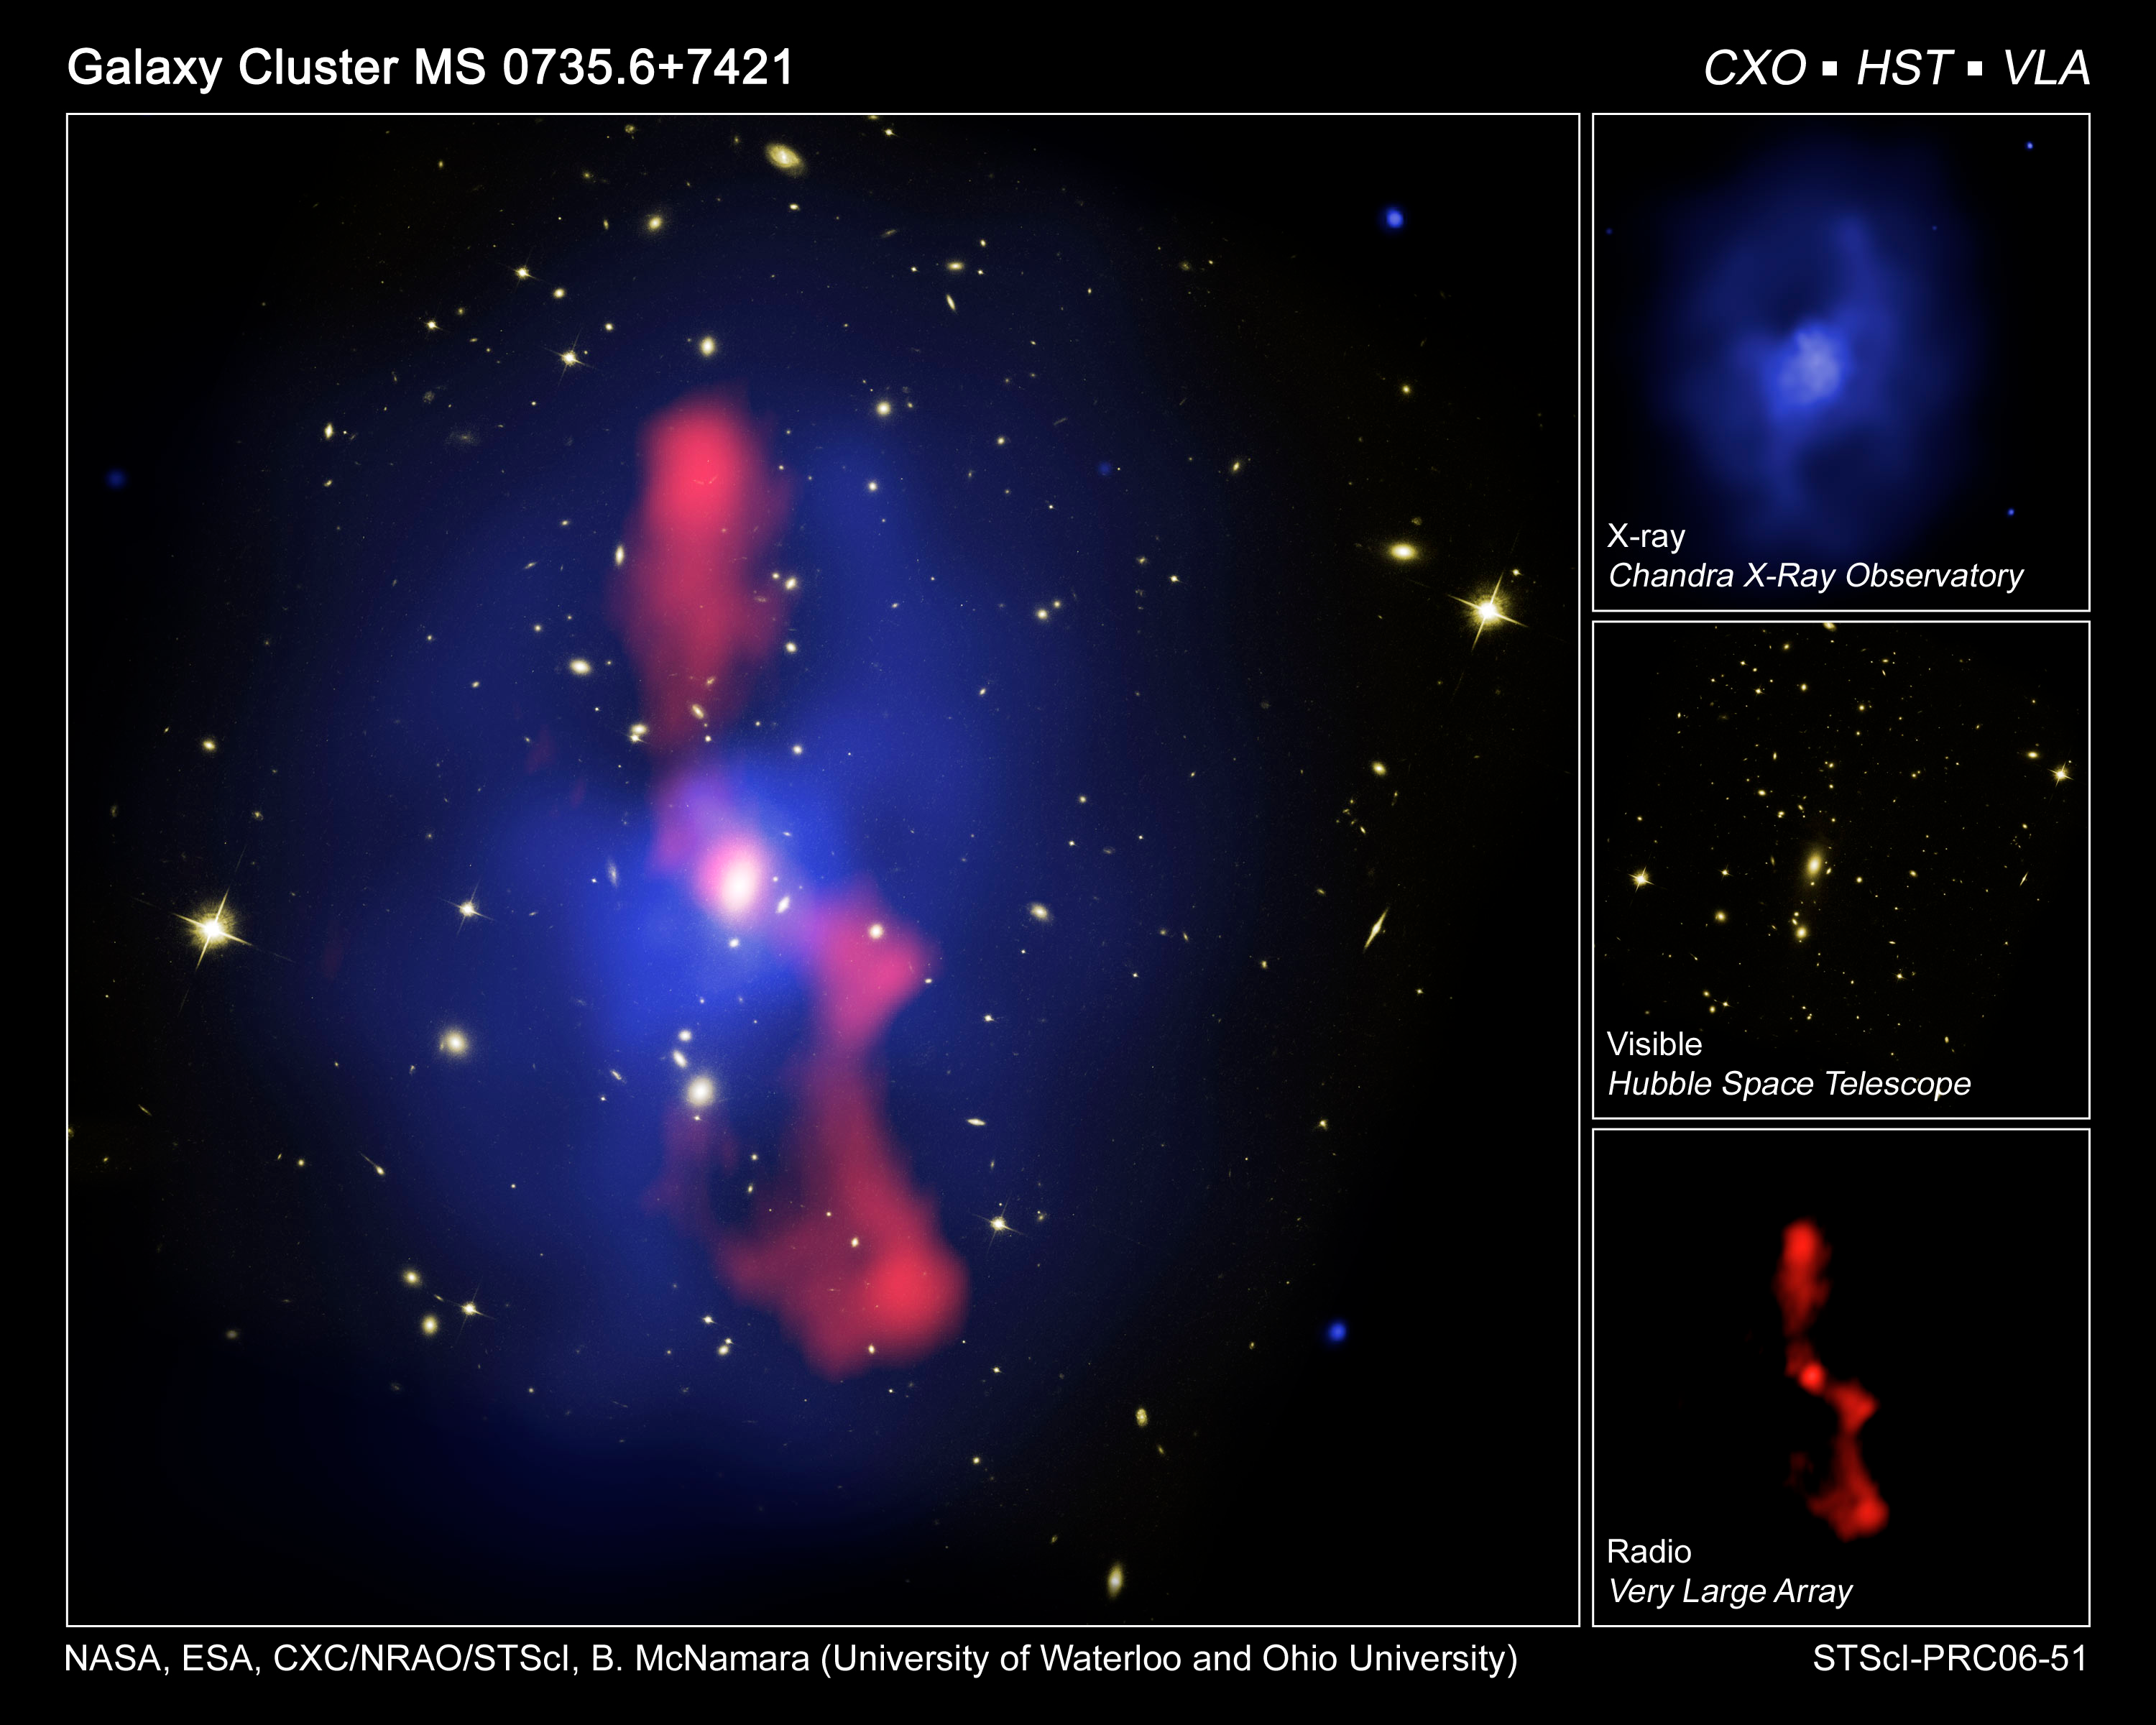

Galaxy cluster MS 0735

This is a composite image of galaxy cluster MS0735.6+7421, located about 2.6 billion light-years away in the constellation Camelopardalis. The image represents three views of the region that astronomers have combined into one photograph. The optical view of the galaxy cluster, taken by the Hubble Space Telescope's Advanced Camera for Surveys in February 2006, shows dozens of galaxies bound together by gravity. Diffuse, hot gas with a temperature of nearly 50 million degrees permeates the space between the galaxies. The gas emits X-rays, seen as blue in the image taken with the Chandra X-ray Observatory in November 2003. The X-ray portion of the image shows enormous holes or cavities in the gas, each roughly 640,000 light-years in diameter - nearly seven times the diameter of the Milky Way. The cavities are filled with charged particles gyrating around magnetic field lines and emitting radio waves shown in the red portion of image taken with the Very Large Array telescope in New Mexico in October 2004. The cavities were created by jets of charged particles ejected at nearly light speed from a supermassive black hole weighing nearly a billion times the mass of our Sun lurking in the nucleus of the bright central galaxy. The jets displaced more than one trillion solar masses worth of gas. The power required to displace the gas exceeded the power output of the Sun by nearly ten trillion times in the past 100 million years.

Credit: Hubble and Chandra: NASA, ESA, CXC, STScI, and B. McNamara (University of Waterloo)
Very Large Array Telescope Image Credit: NRAO, and L. Birzan and team (Ohio University)